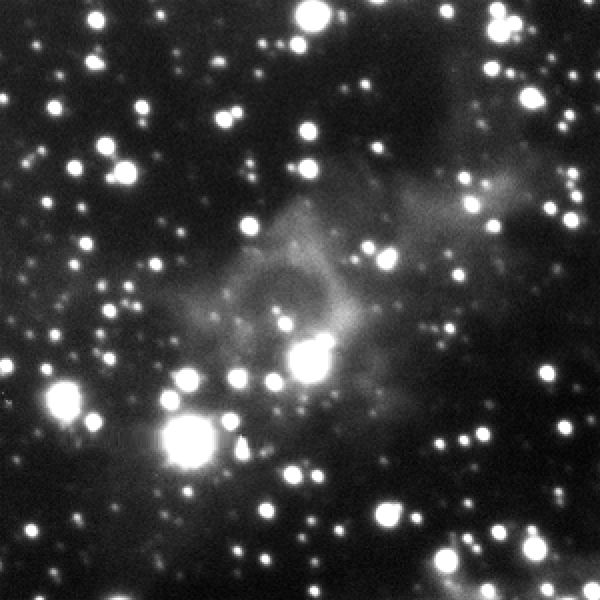

Eta Carinae light echo brightening — 6 February 2011

The double-star system Eta Carinae, about 120 times more massive than the Sun, produced a spectacular outburst that was seen on Earth from 1837 to 1858. This image shows the light from Eta Carinae's outburst illuminating the dust clouds near the doomed star system as it moves through them. The effect is like shining a flashlight on different regions of a vast cavern. The image was taken in February 2011 with the NOAO Optical Astronomy Observatory's Blanco 4-metre telescope at the Cerro Tololo Inter-American Observatory in Chile.

Credit: NASA, NOAO, and A. Rest (STScI)